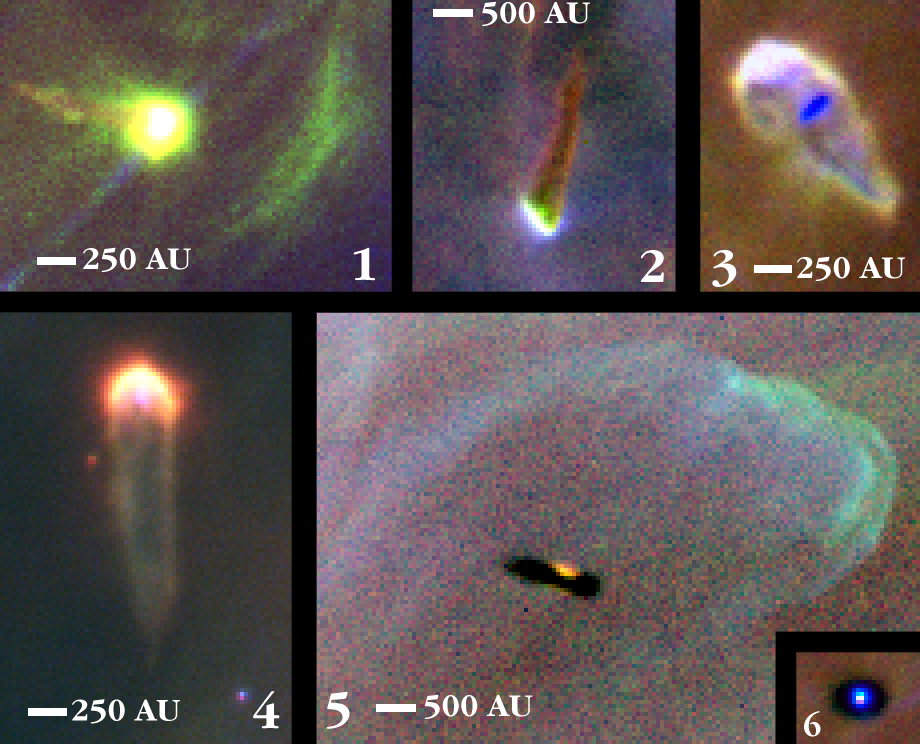

Proplyds in the Orion Nebula

Glowing protoplanetary disks (first discovered with the Hubble in 1992, and dubbed "proplyds") that are believed to be embryonic solar systems that will eventually form planets. (Our solar system has long been considered the relic of just such a disk that formed around the newborn Sun). The abundance of such objects in the Orion nebula strengthens the argument that planet formation is a common occurrence in the universe. Some of the proplyds, those that are closest to the Trapezium stars at the centre of the Orion Nebula, are shedding some of their gas and dust. The pressure of starlight from the hottest stars forms "tails" which act like wind vanes pointing away from the Trapezium. These tails result from the light from the star pushing the dust and gas away from the outside layers of the proplyds. In addition to the luminescent proplyds, seven disks are silhouetted against the bright background of the nebula. These dark objects allow Hubble astronomers to estimate the masses of the disks as at least 0.1 to 730 times the mass of our Earth.

Credit: NASA, C.R. O'Dell and S.K. Wong (Rice University)